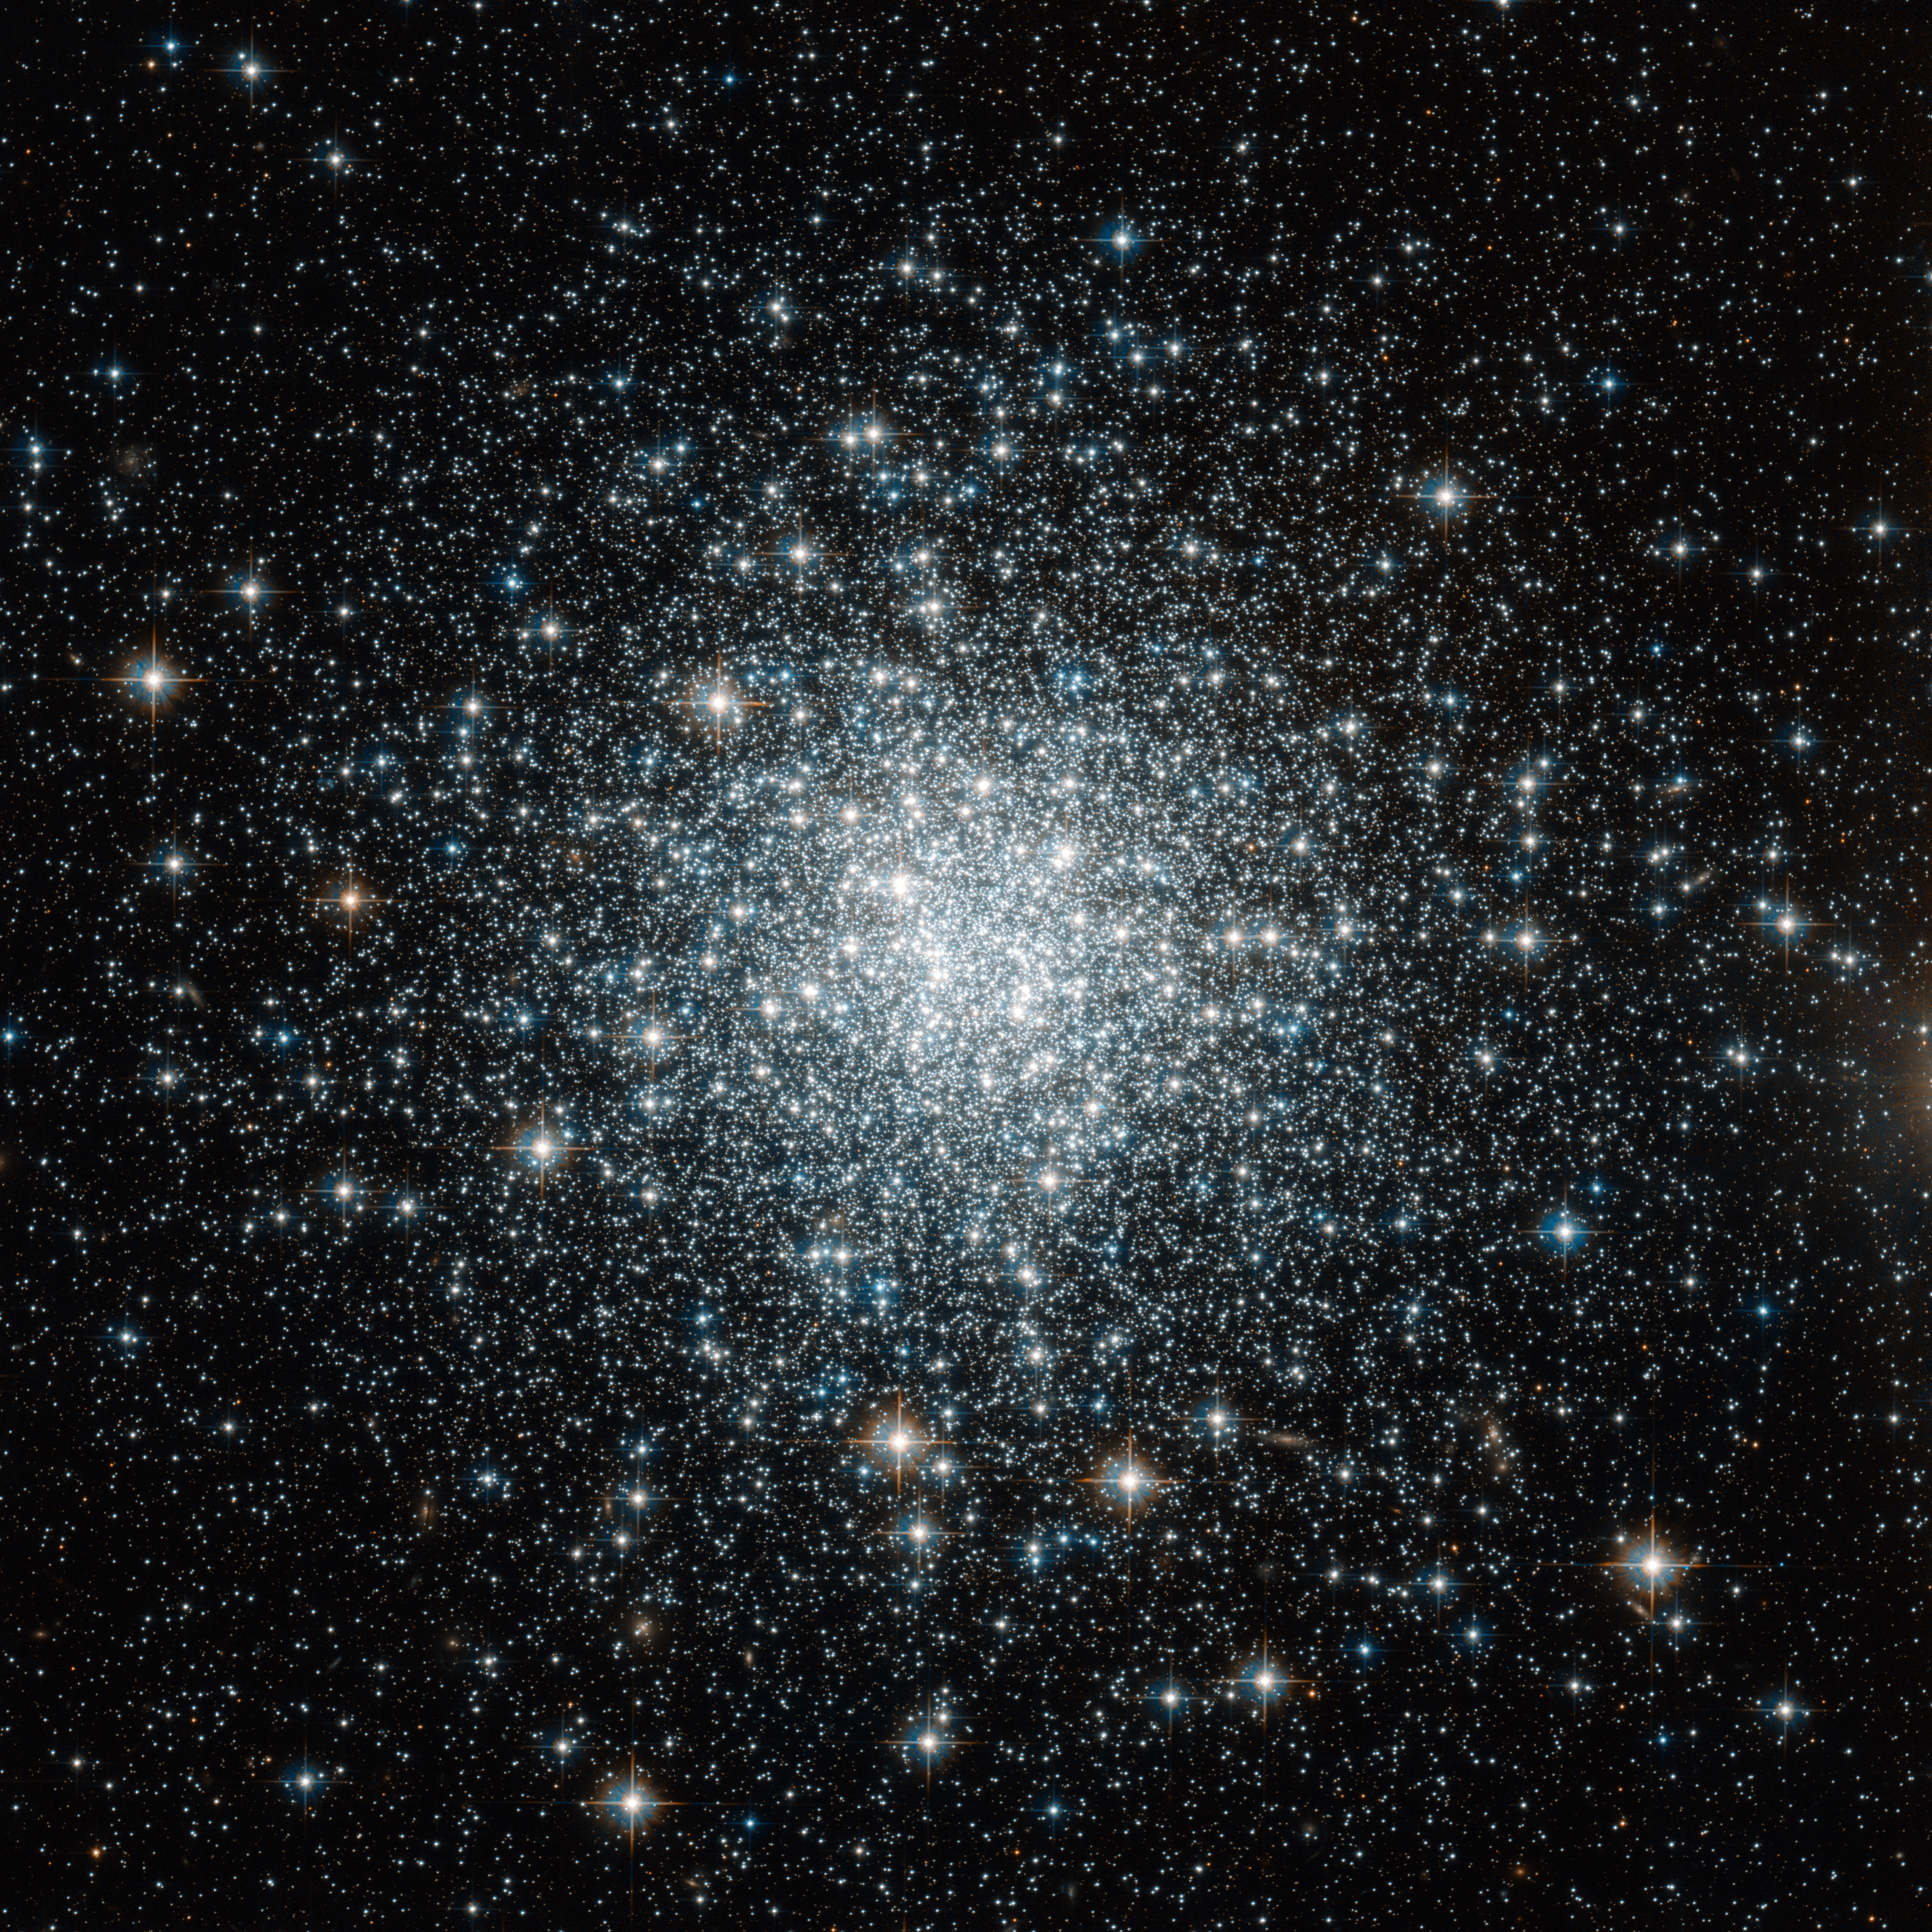

A Distant backwater of the Milky Way

This bright spray of stars in the small but evocative constellation of Delphinus (the Dolphin) is the globular cluster NGC 6934. Globular clusters are large balls of (typically) a few hundred thousand ancient stars that exist on the edges of galaxies.

Lying 50 000 light-years from Earth, in the outer reaches of our Milky Way galaxy, NGC 6934 is home to some of the most distant stars still to be part of our galactic system — in a sense, it is a far-flung suburb to the Milky Way’s city centre.

NGC 6934 was first seen by William Herschel in the late eighteenth century. He classified it as a “bright nebula” and was not able to resolve it into stars. The cluster is not bright enough to see with the naked eye, and even in ideal conditions it is very difficult to view with binoculars. However, it is a popular target for amateur astronomers as it can easily be observed using relatively inexpensive telescopes. Broadcaster Patrick Moore, presenter of BBC TV’s The Sky at Night for more than 50 years, included this cluster in his “Caldwell catalogue” of celestial objects that amateur astronomers should look out for.

NGC 6934’s faintness is down to its distance — not how bright it really is. With its many thousands of stars, the cluster is no minnow. The fact that the huge core of our galaxy dwarfs it, along with the other 150 or so globular clusters that orbit the Milky Way’s galactic centre, is a reminder of the breathtaking scale of the cosmos.

This picture was taken with the Wide Field Channel of the NASA/ESA Hubble Space Telescope’s Advanced Camera for Surveys. It was created from images taken through filters F814W (near infrared) and F606W (orange), coloured red and blue respectively. The exposure times were 29 minutes per filter, and the field of view is 3.3 arcminutes across.

Credit: ESA/Hubble & NASA